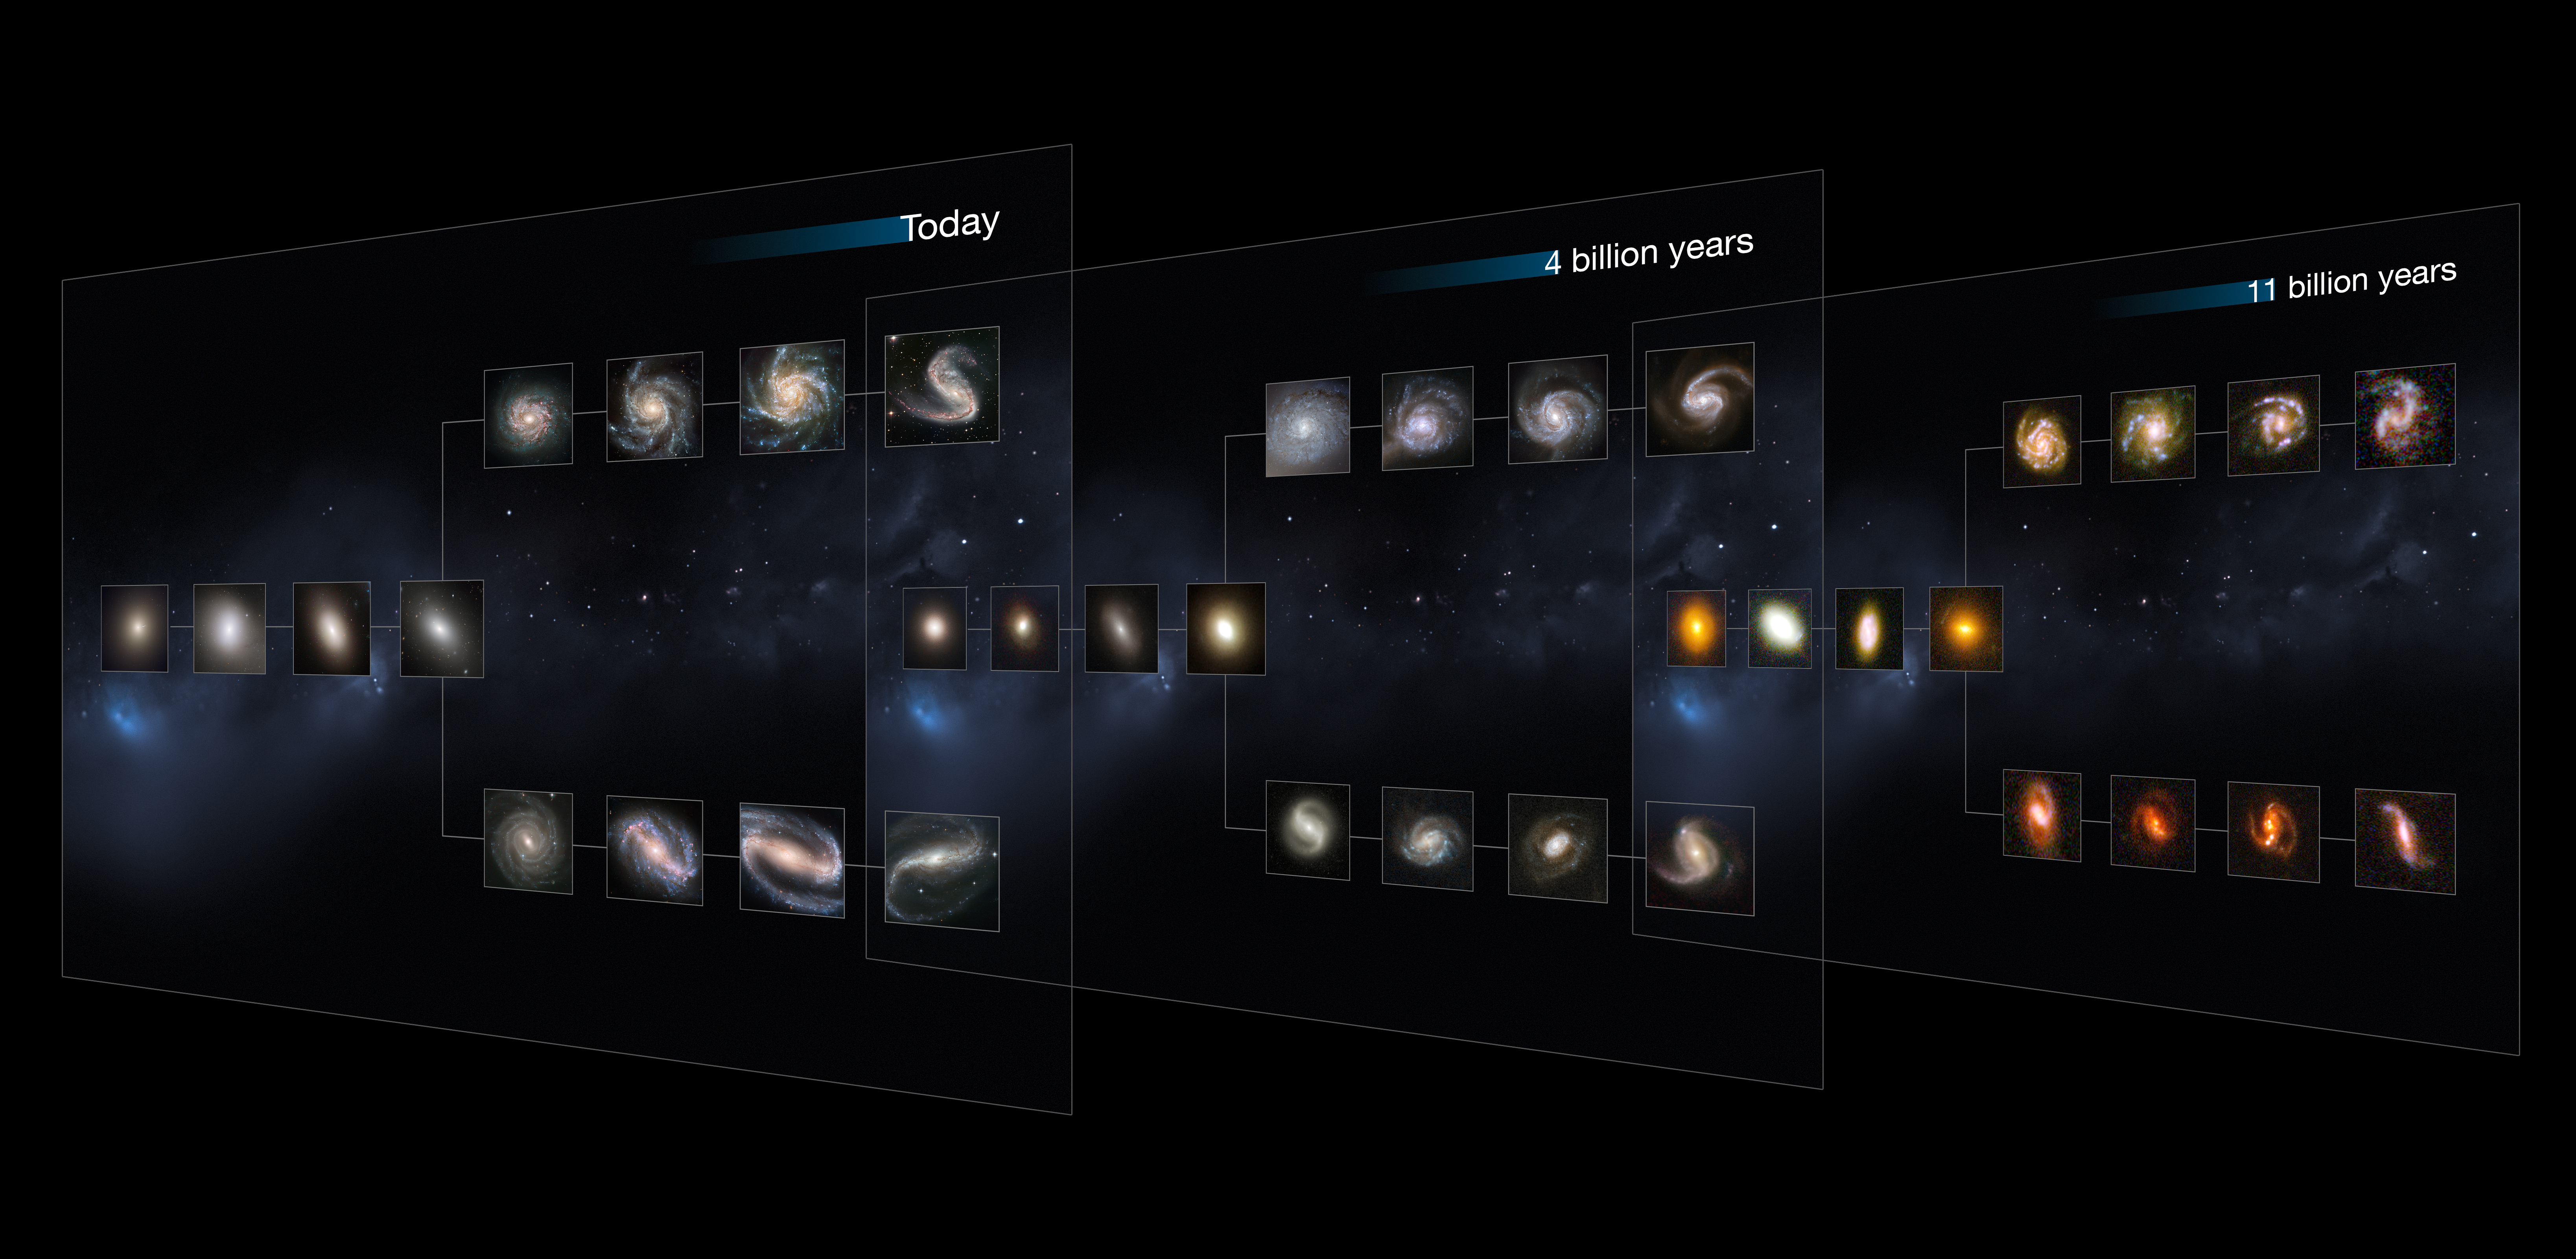

The Hubble Sequence throughout the Universe's history

This image shows "slices" of the Universe at different times throughout its history (present day, and at 4 and 11 billion years ago). Each slice goes further back in time, showing how galaxies of each type appear. The shape is that of the Hubble tuning fork diagram, which describes and separates galaxies according to their morphology into spiral (S), elliptical (E), and lenticular (S0) galaxies. On the left of this diagram are the ellipticals, with lenticulars in the middle, and the spirals branching out on the right side. The spirals on the bottom branch have bars cutting through their centres.

The present-day Universe shows big, fully formed and intricate galaxy shapes. As we go further back in time, they become smaller and less mature, as these galaxies are still in the process of forming.

This image is illustrative. the Hubble images of nearby and distant galaxies used were selected based on their appearance; their individual distances are only approximate.

Credit: NASA, ESA, M. Kornmesser